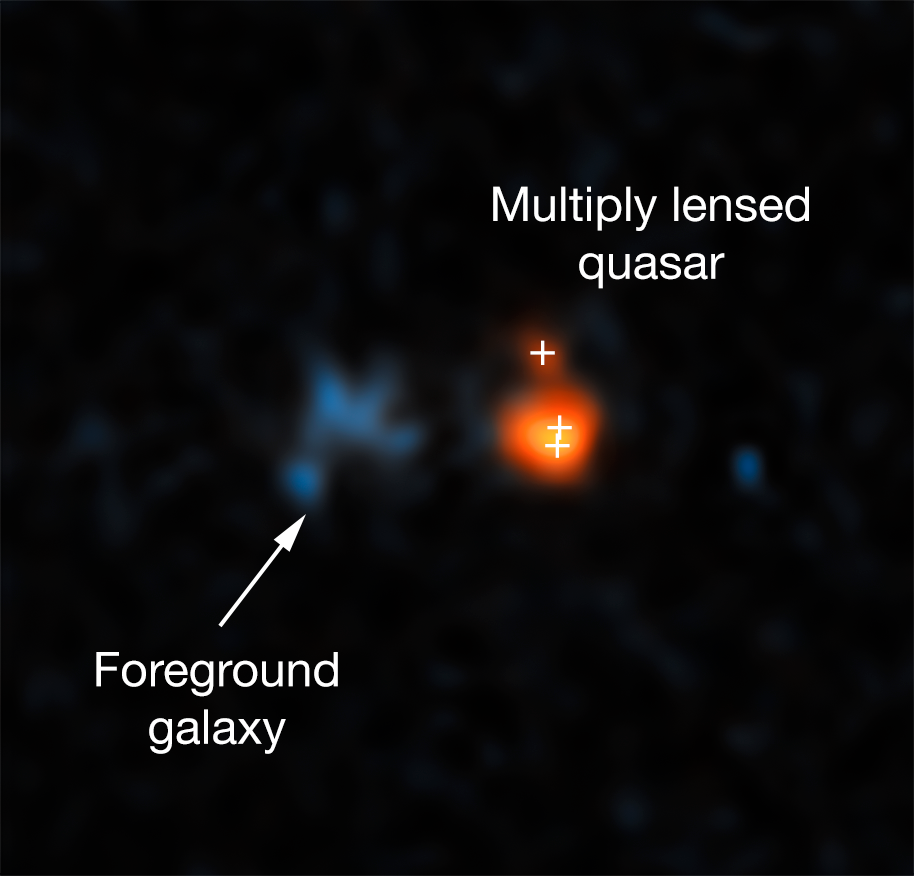

Hubble’s view on distant quasar

This image shows the distant quasar J043947.08+163415.7 as it was observed with the NASA/ESA Hubble Space Telescope. The quasar is one of the brightest objects in the early Universe. However, due to its distance it only became visible as its image was made brighter and larger by gravitational lensing.

The system of the lensed images and the actual lens is so compact that Hubble is the only optical telescope able to resolve it.

Credit: NASA, ESA, X. Fan (University of Arizona)